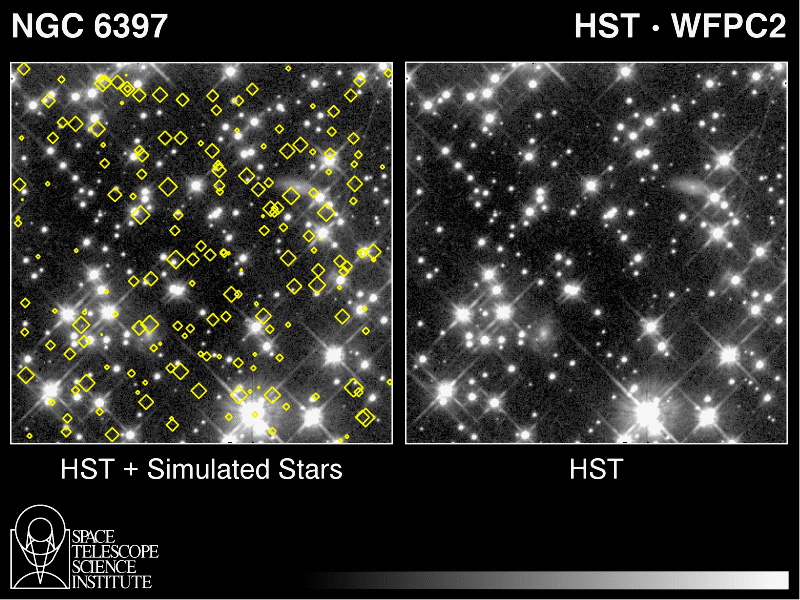

Search for Red Dwarfs in NGC 6397

Left Image

A Hubble Space Telescope image of a small region (1.4 light-years across) in the globular star cluster NGC 6397. Simulated stars (diamonds) have been added to this view of the same region of the cluster to illustrate what astronomers would have expected to see if faint red dwarf stars were abundant in the Milky Way Galaxy. The field would then contain 500 stars, according to theoretical calculations.

Right Image

The unmodified HST image shows far fewer stars than would be expected, according to popular theories of star formation. HST resolves about 200 stars. The stellar density is so low that HST can literally see right through the cluster and resolve far more distant background galaxies. From this observation, scientists have identified the surprising cutoff point below which nature apparently doesn't make many stars smaller that 1/5 the mass of our Sun. These HST findings provide new insights into star formation in our Galaxy.

Credit: F. Paresce, ST ScI & ESA and NASA